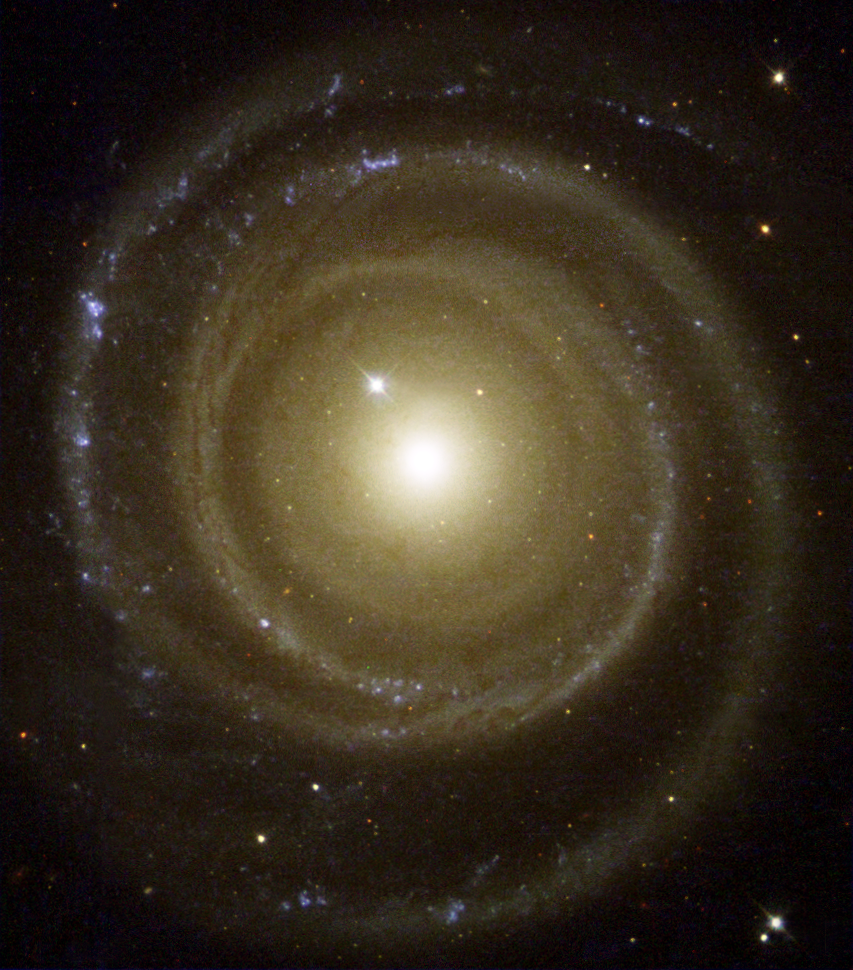

Back Spin Galaxy

Astronomers have found a spiral galaxy that may be spinning to the beat of a different cosmic drummer. To the surprise of astronomers, the galaxy, called NGC 4622, appears to be rotating in the opposite direction to what they expected. Pictures from the NASA/ESA Hubble Space Telescope helped astronomers determine that the galaxy may be spinning clockwise by showing which side of the galaxy is closer to Earth. This Hubble telescope photo of the oddball galaxy is presented by the Hubble Heritage team. The image shows NGC 4622 and its outer pair of winding arms full of new stars [shown in blue].

Credit: NASA/ESA and The Hubble Heritage Team (STScI/AURA)